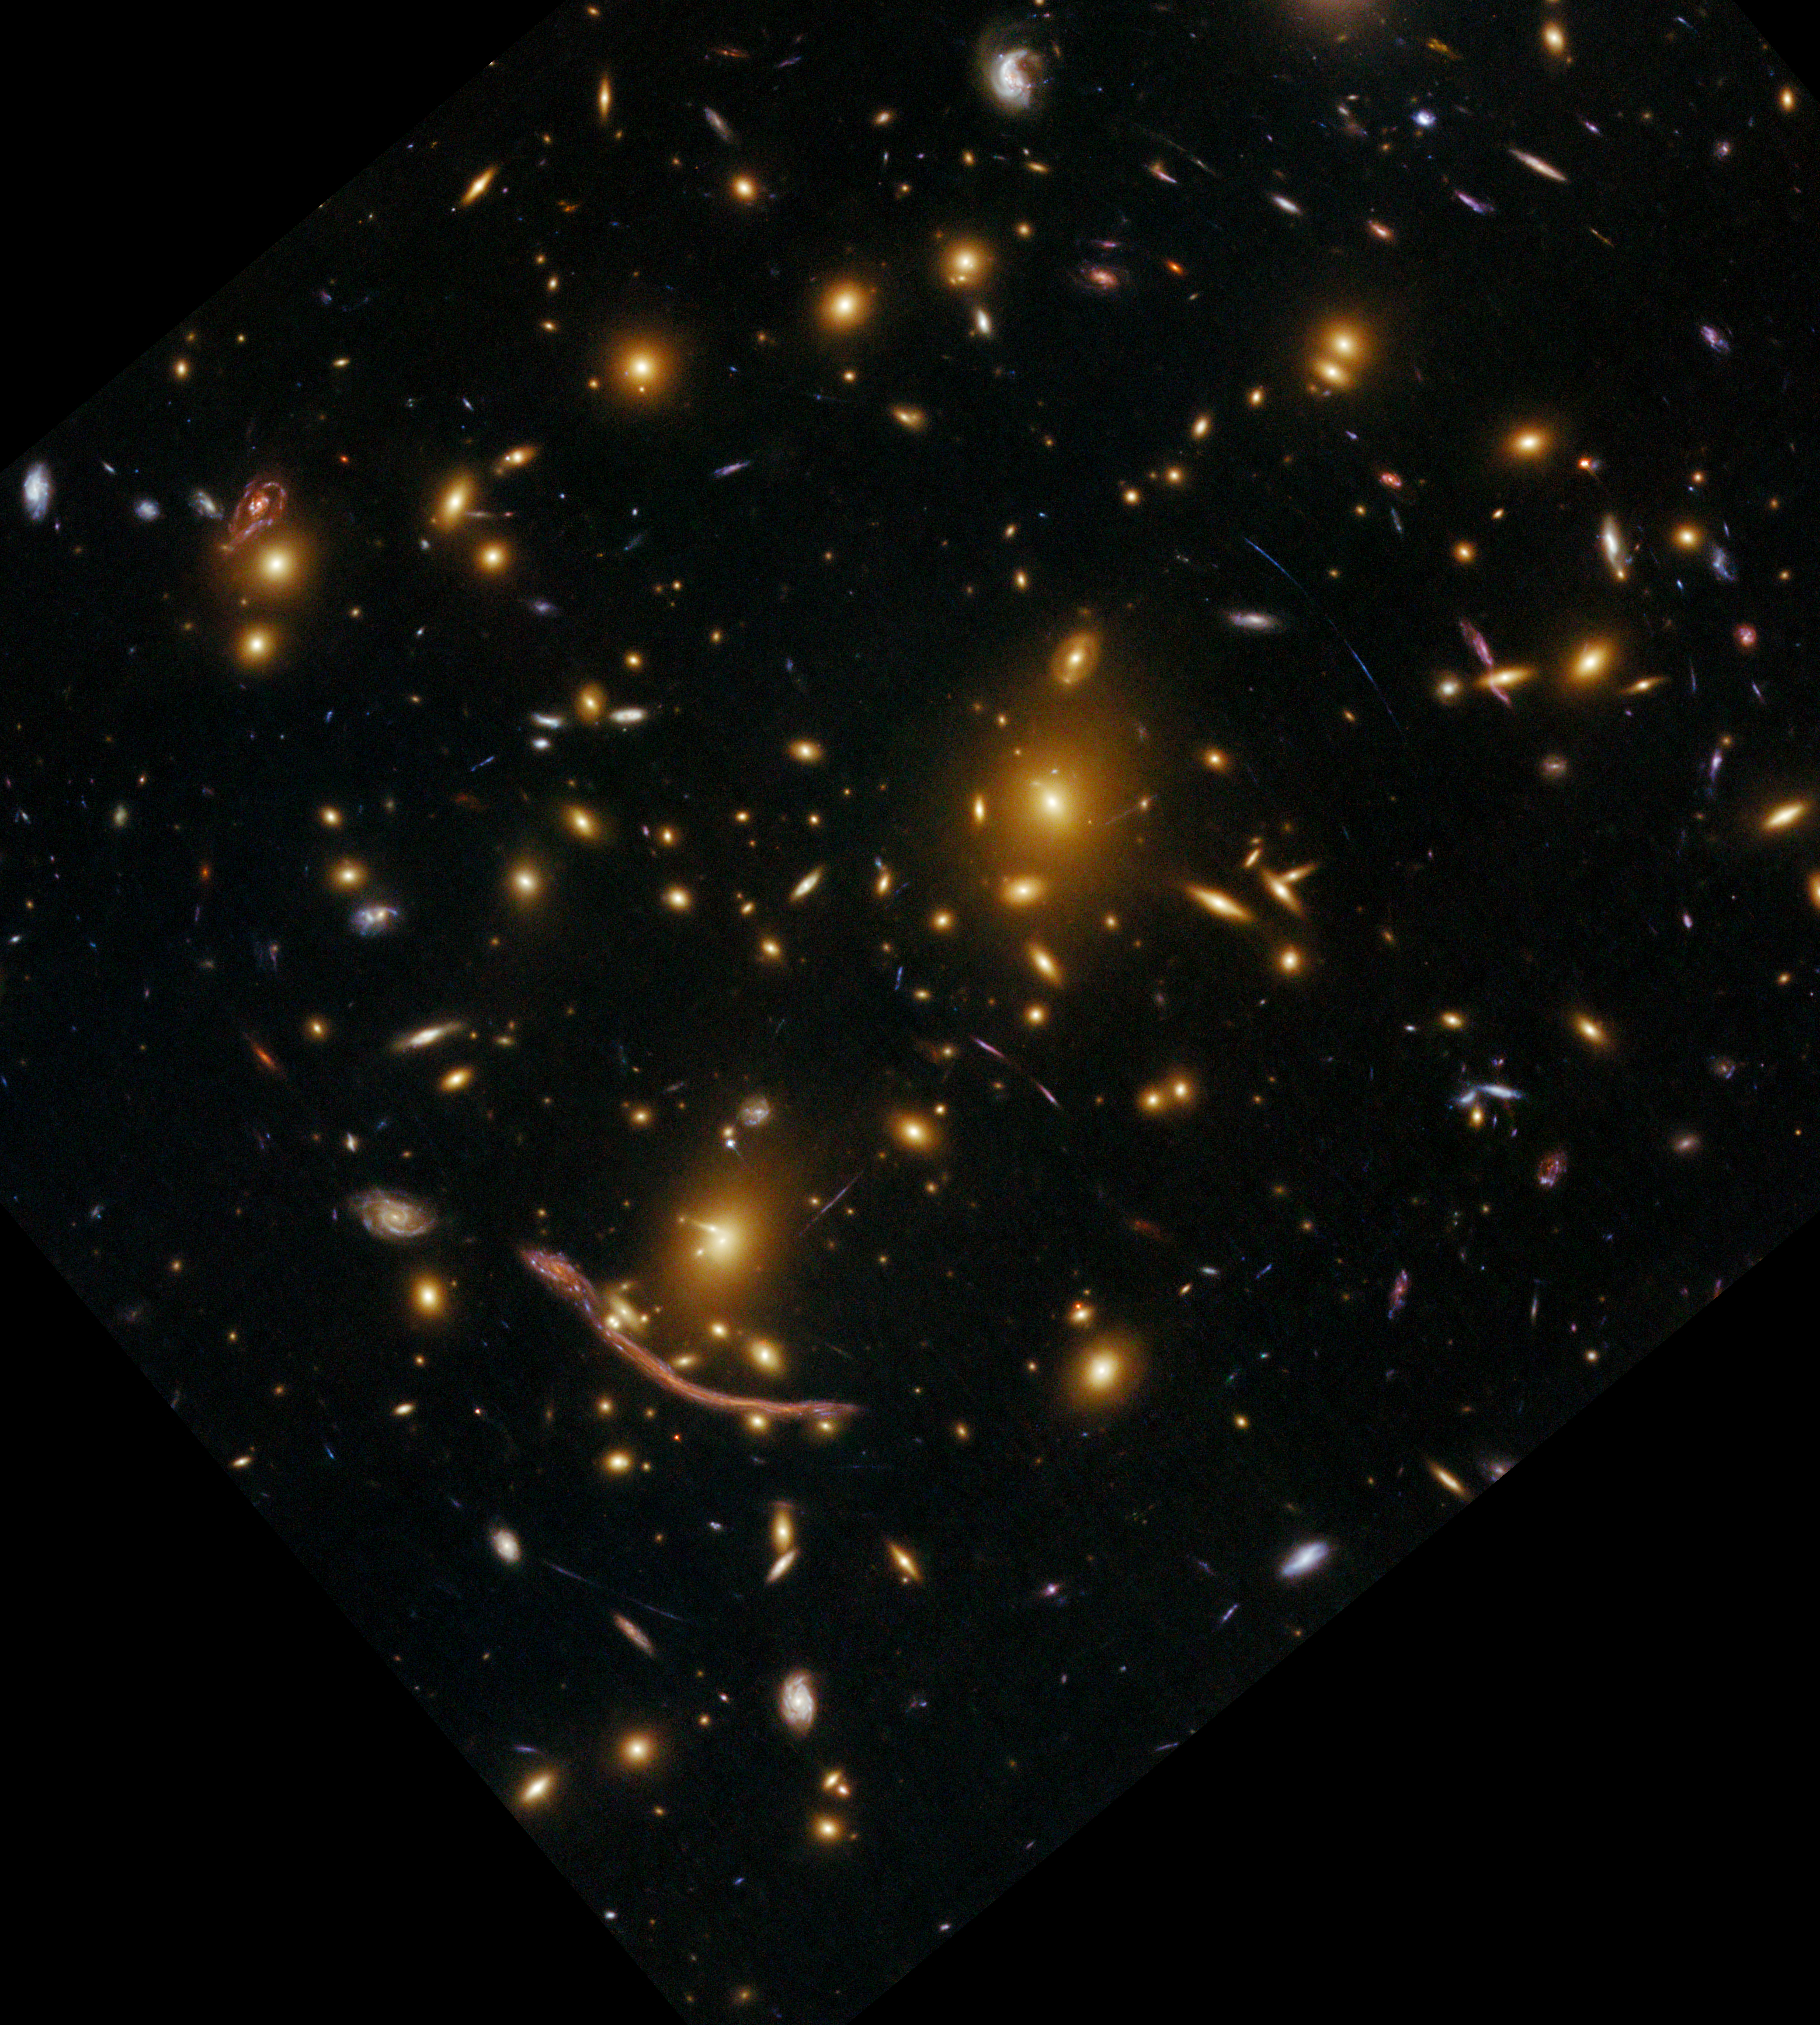

Abell 370 (seen in 2009)

This image of Abell 370 was released in 2009. Compared to the new image, which contains more observation time, less structures are visible and faint objects have disappeared — the new image has increased the depth of the image dramatically, clearly showing the benefit of additional observation time. A direct comparison between both images can be seen here.

Credit: ESA/Hubble